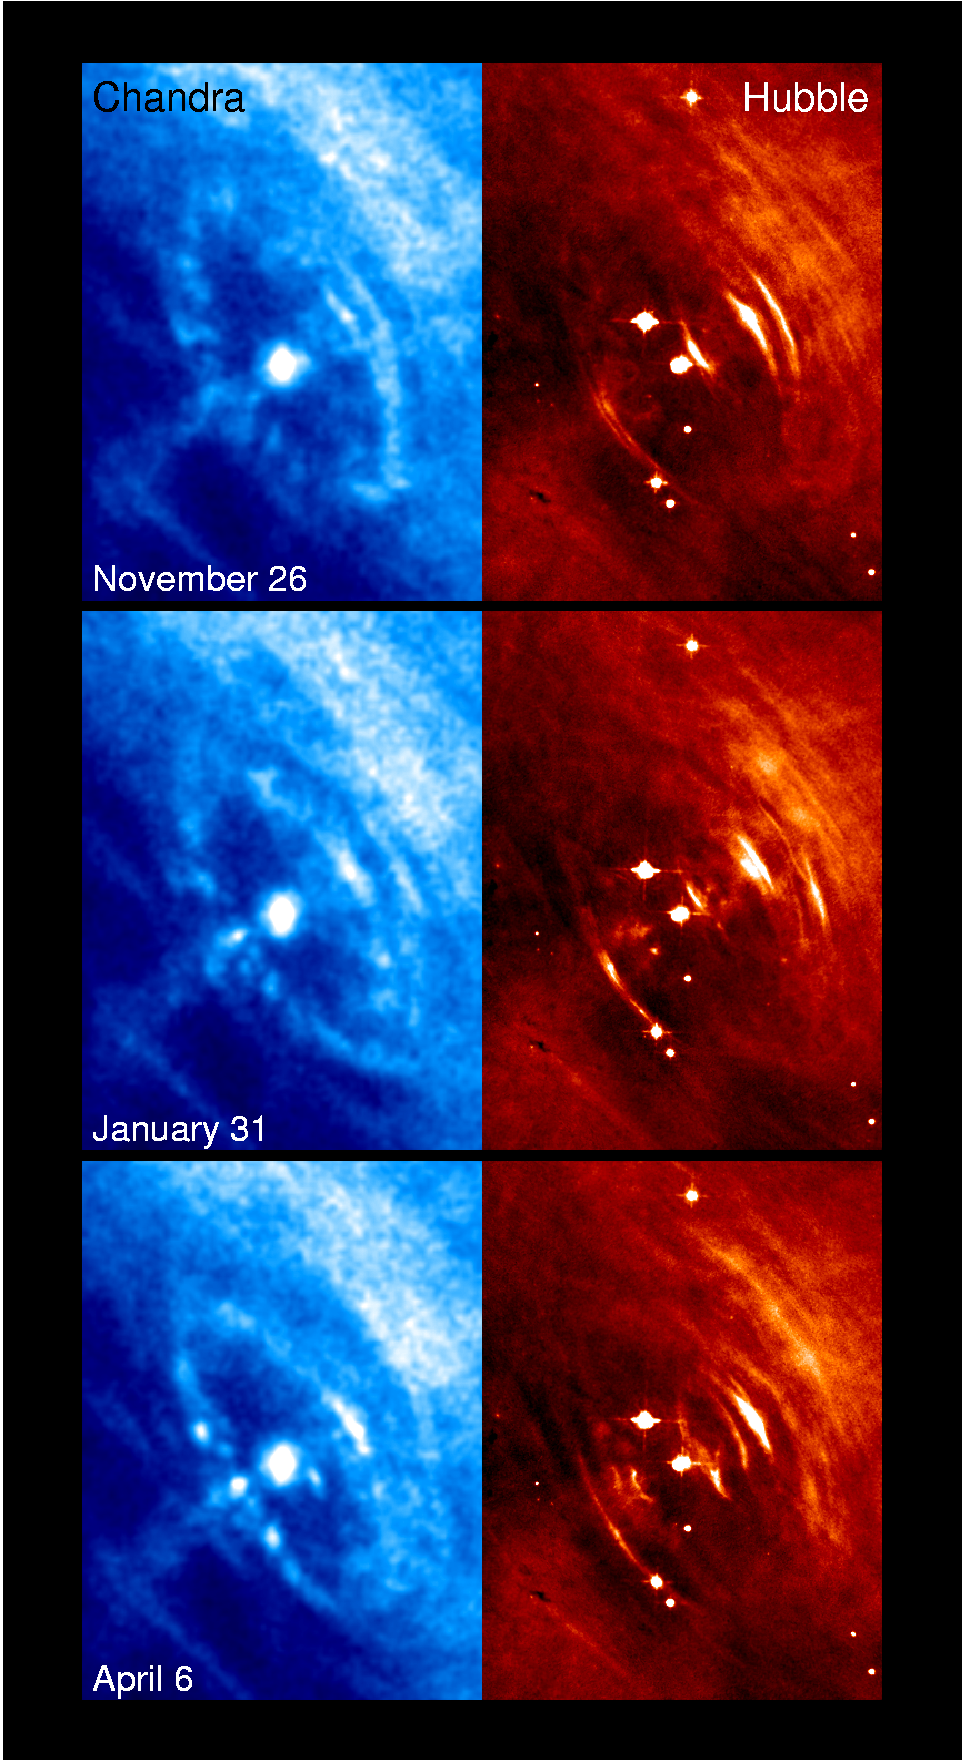

6 panel of Chandra & Hubble, close up

This close up view of the Chandra (left) and Hubble (right) images shows the motion of the wisps in 3 sets of the Crab Nebula joint observations.

Credit: NASA/ESA/CXC/ASU/J. Hester et al., HST/ASU/J. Hester et al.